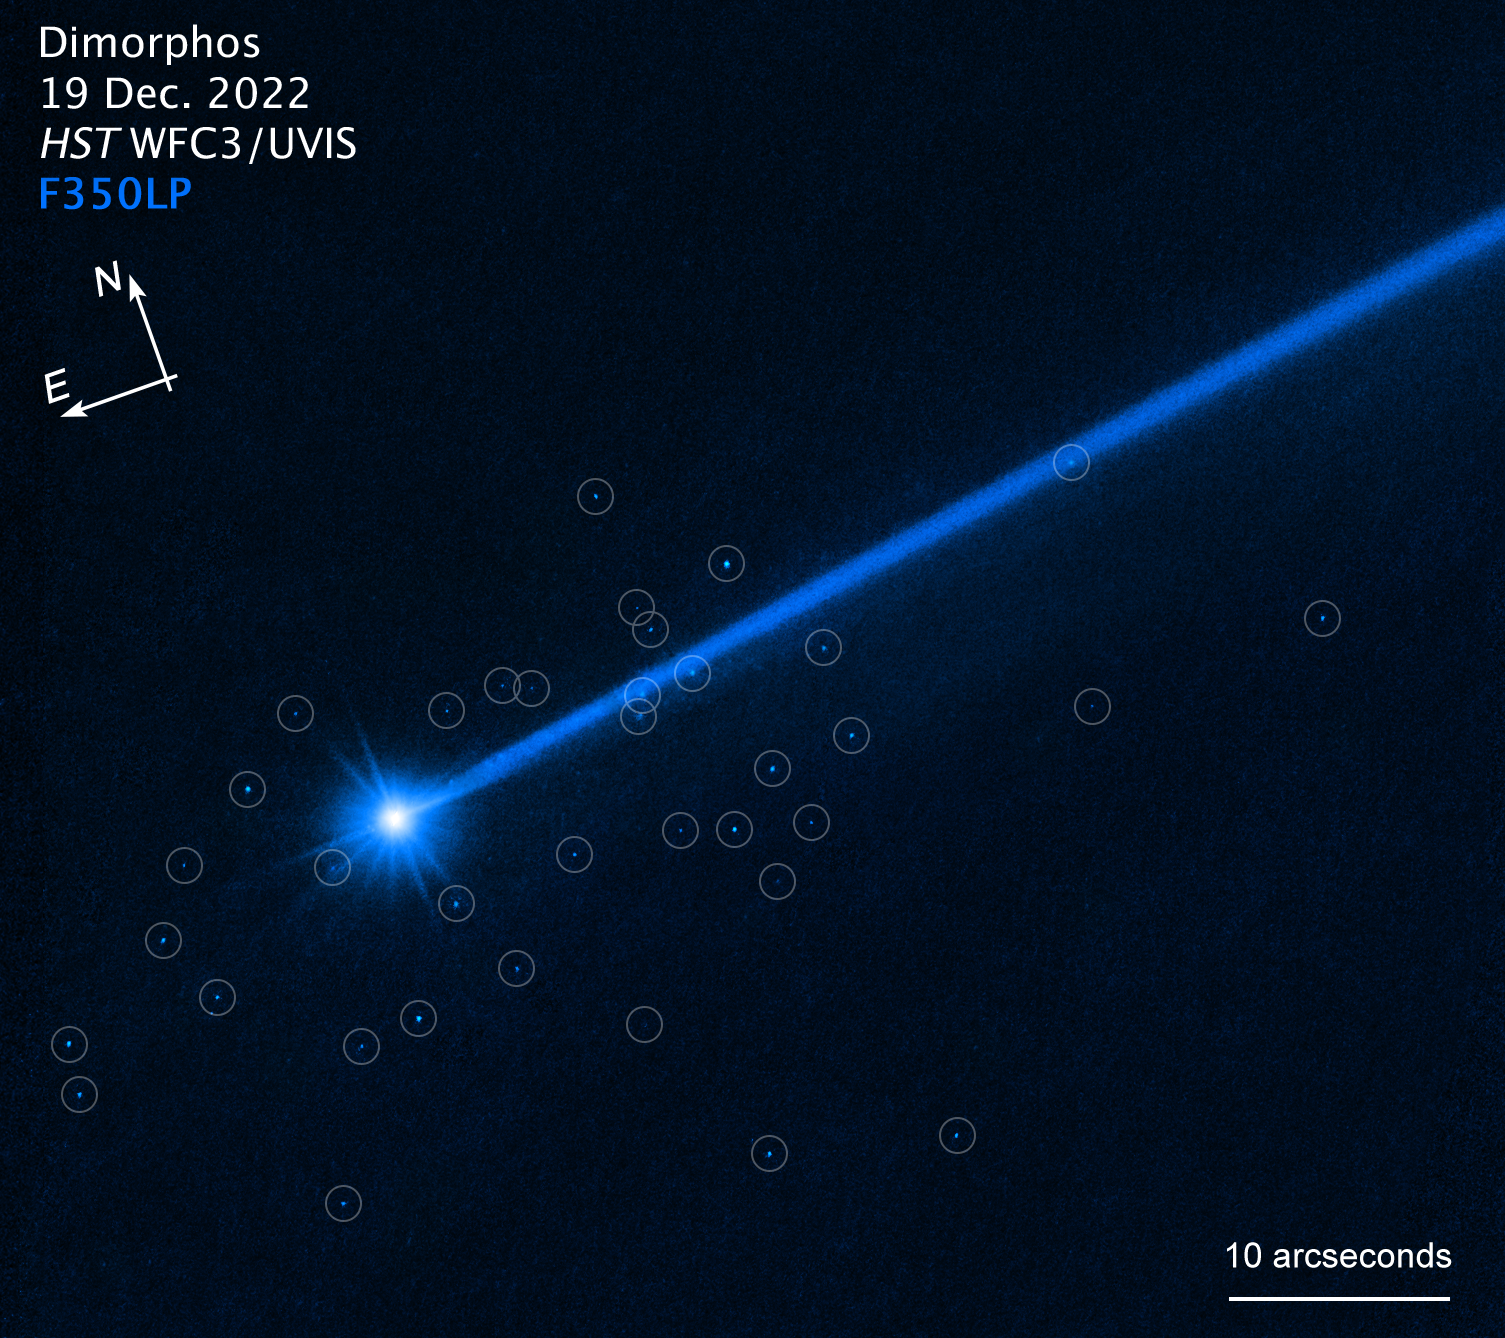

Hubble sees boulders escaping from asteroid Dimorphos (annotated)

This NASA/ESA Hubble Space Telescope image of the asteroid Dimorphos was taken on 19 December 2022, nearly four months after the asteroid was impacted by NASA’s DART (Double Asteroid Redirection Test) mission. Hubble’s sensitivity reveals a few dozen boulders knocked off the asteroid by the force of the collision. These are among the faintest objects Hubble has ever photographed inside the Solar System. The ejected boulders range in size from 1 metre to 6.7 metres across, based on Hubble photometry. They are drifting away from the asteroid at around a kilometre per hour. The discovery yields invaluable insights into the behaviour of a small asteroid when it is hit by a projectile for the purpose of altering its trajectory.

Credit: NASA, ESA, D. Jewitt (UCLA)